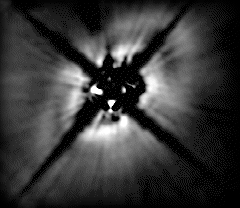

Gap in stellar dust disk may be swept out by planet

A striking NASA/ESA Hubble Space Telescope near-infrared picture of a disk around the star HD 141569, located about 320 light-years away in the constellation Libra. Hubble shows that the 75 billion-mile wide disk seems to come in two parts: a dark band separates a bright inner region from a fainter outer region. The structure superficially looks much like the largest gap in Saturn's rings - but on a vastly larger scale.

Credit: Alycia Weinberger, Eric Becklin (UCLA), Glenn Schneider (University of Arizona) and NASA/ESA